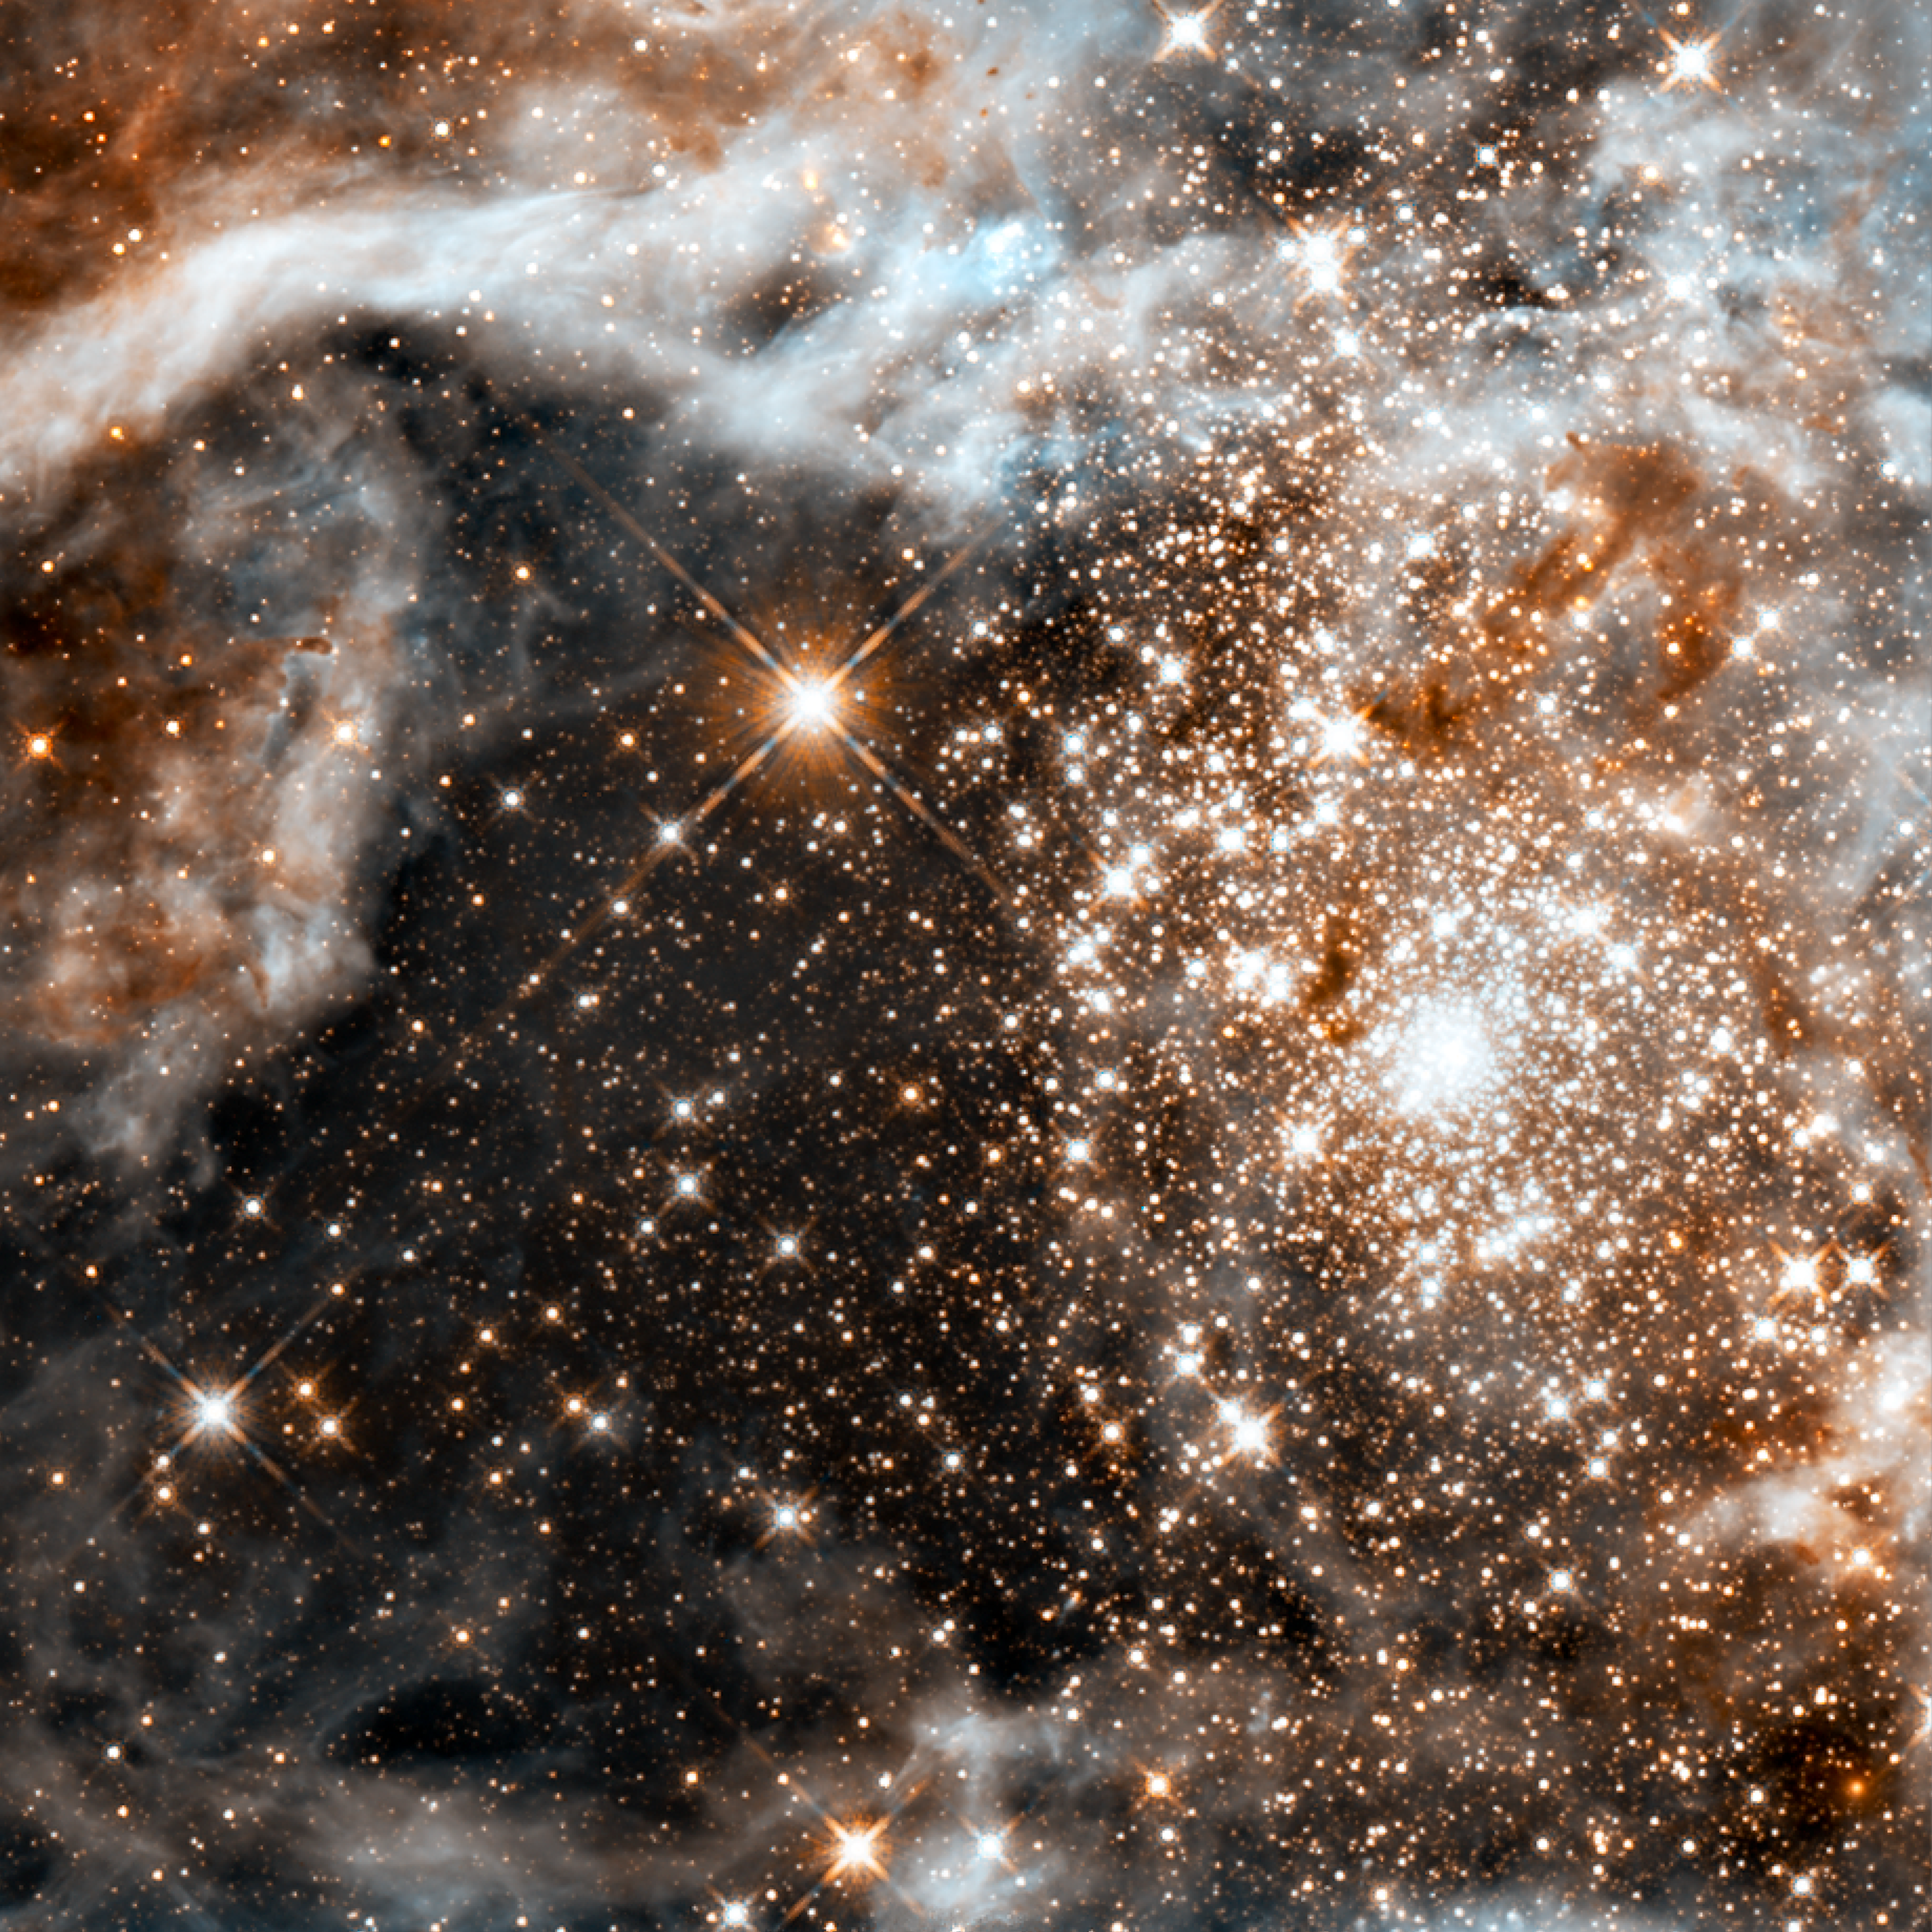

30 Doradus in Infrared

This image is the most detailed view of the largest stellar nursery in our local galactic neighborhood. The stellar grouping, called R136, is only a few million years old and resides in the 30 Doradus Nebula, a turbulent star-birth region in the Large Magellanic Cloud (LMC), a satellite galaxy of our Milky Way. There is no known star-forming region in our galaxy as large or as prolific as 30 Doradus. Many of the diamond-like stars are among the most massive stars known. Several of them are over 100 times more massive than our Sun.

Credit: NASA, ESA, F. Paresce (INAF-IASF, Bologna, Italy), R. O'Connell (University of Virginia, Charlottesville), and the Wide Field Camera 3 Science Oversight Committee